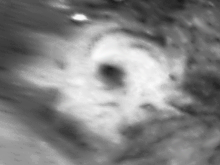

Hubble Views Collossal Polar Cyclone on Mars

Enhanced orthographic view of the storm centered on 65 deg. N latitude, 85 deg. W longitude. The image has been processed to bring out additional detail in the storm's spiral cloud structures.

Credit: Jim Bell (Cornell U.), Steve Lee (U. Colorado), Mike Wolff (SSI), andNASA/ESA